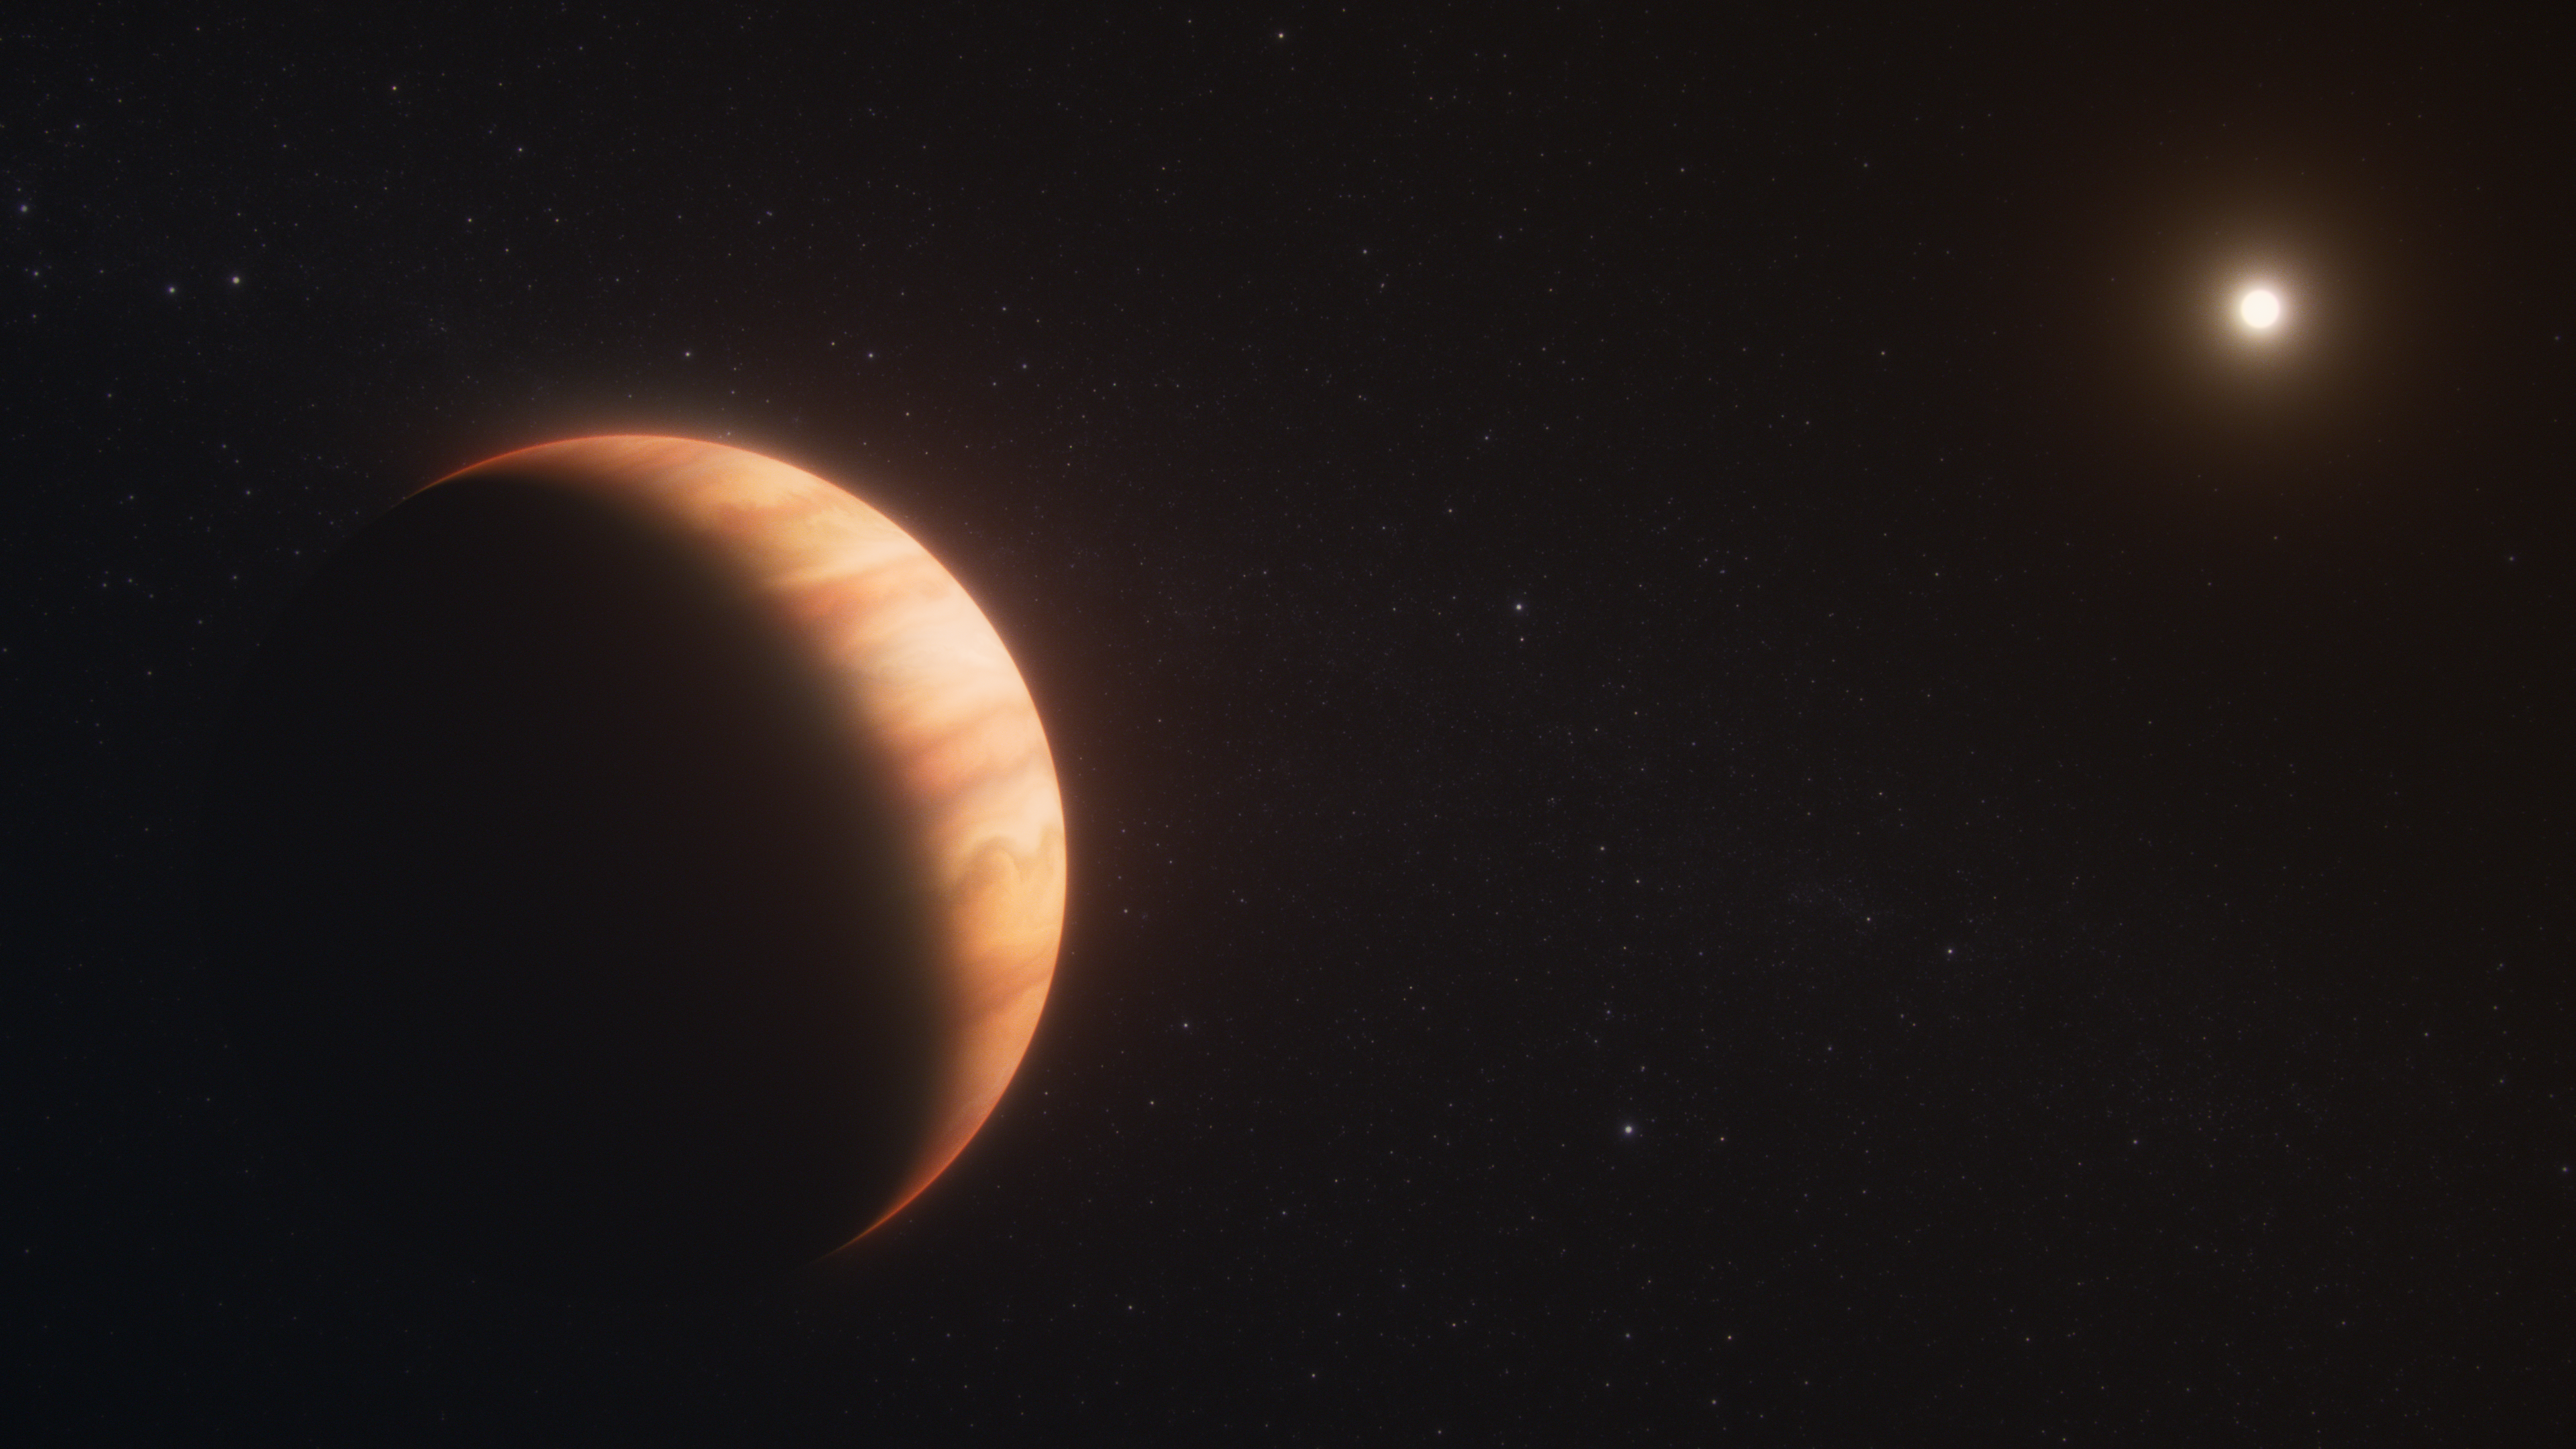

Exoplanet WD 1856 b (artist’s concept)

Exoplanet WD 1856 b, shown in this artist’s concept, is a gas giant that survived the death of its star. It now orbits a white dwarf at a distance 50 times closer than Earth orbits the Sun. Observations by the NASA/ESA/CSA James Webb Space Telescope not only determined the planet’s temperature but also detected molecules in its atmosphere. The former measurement provides evidence that WD 1856 b migrated to its current location billions of years after its star became a white dwarf.

Credit: NASA, ESA, CSA, R. Crawford (STScI)